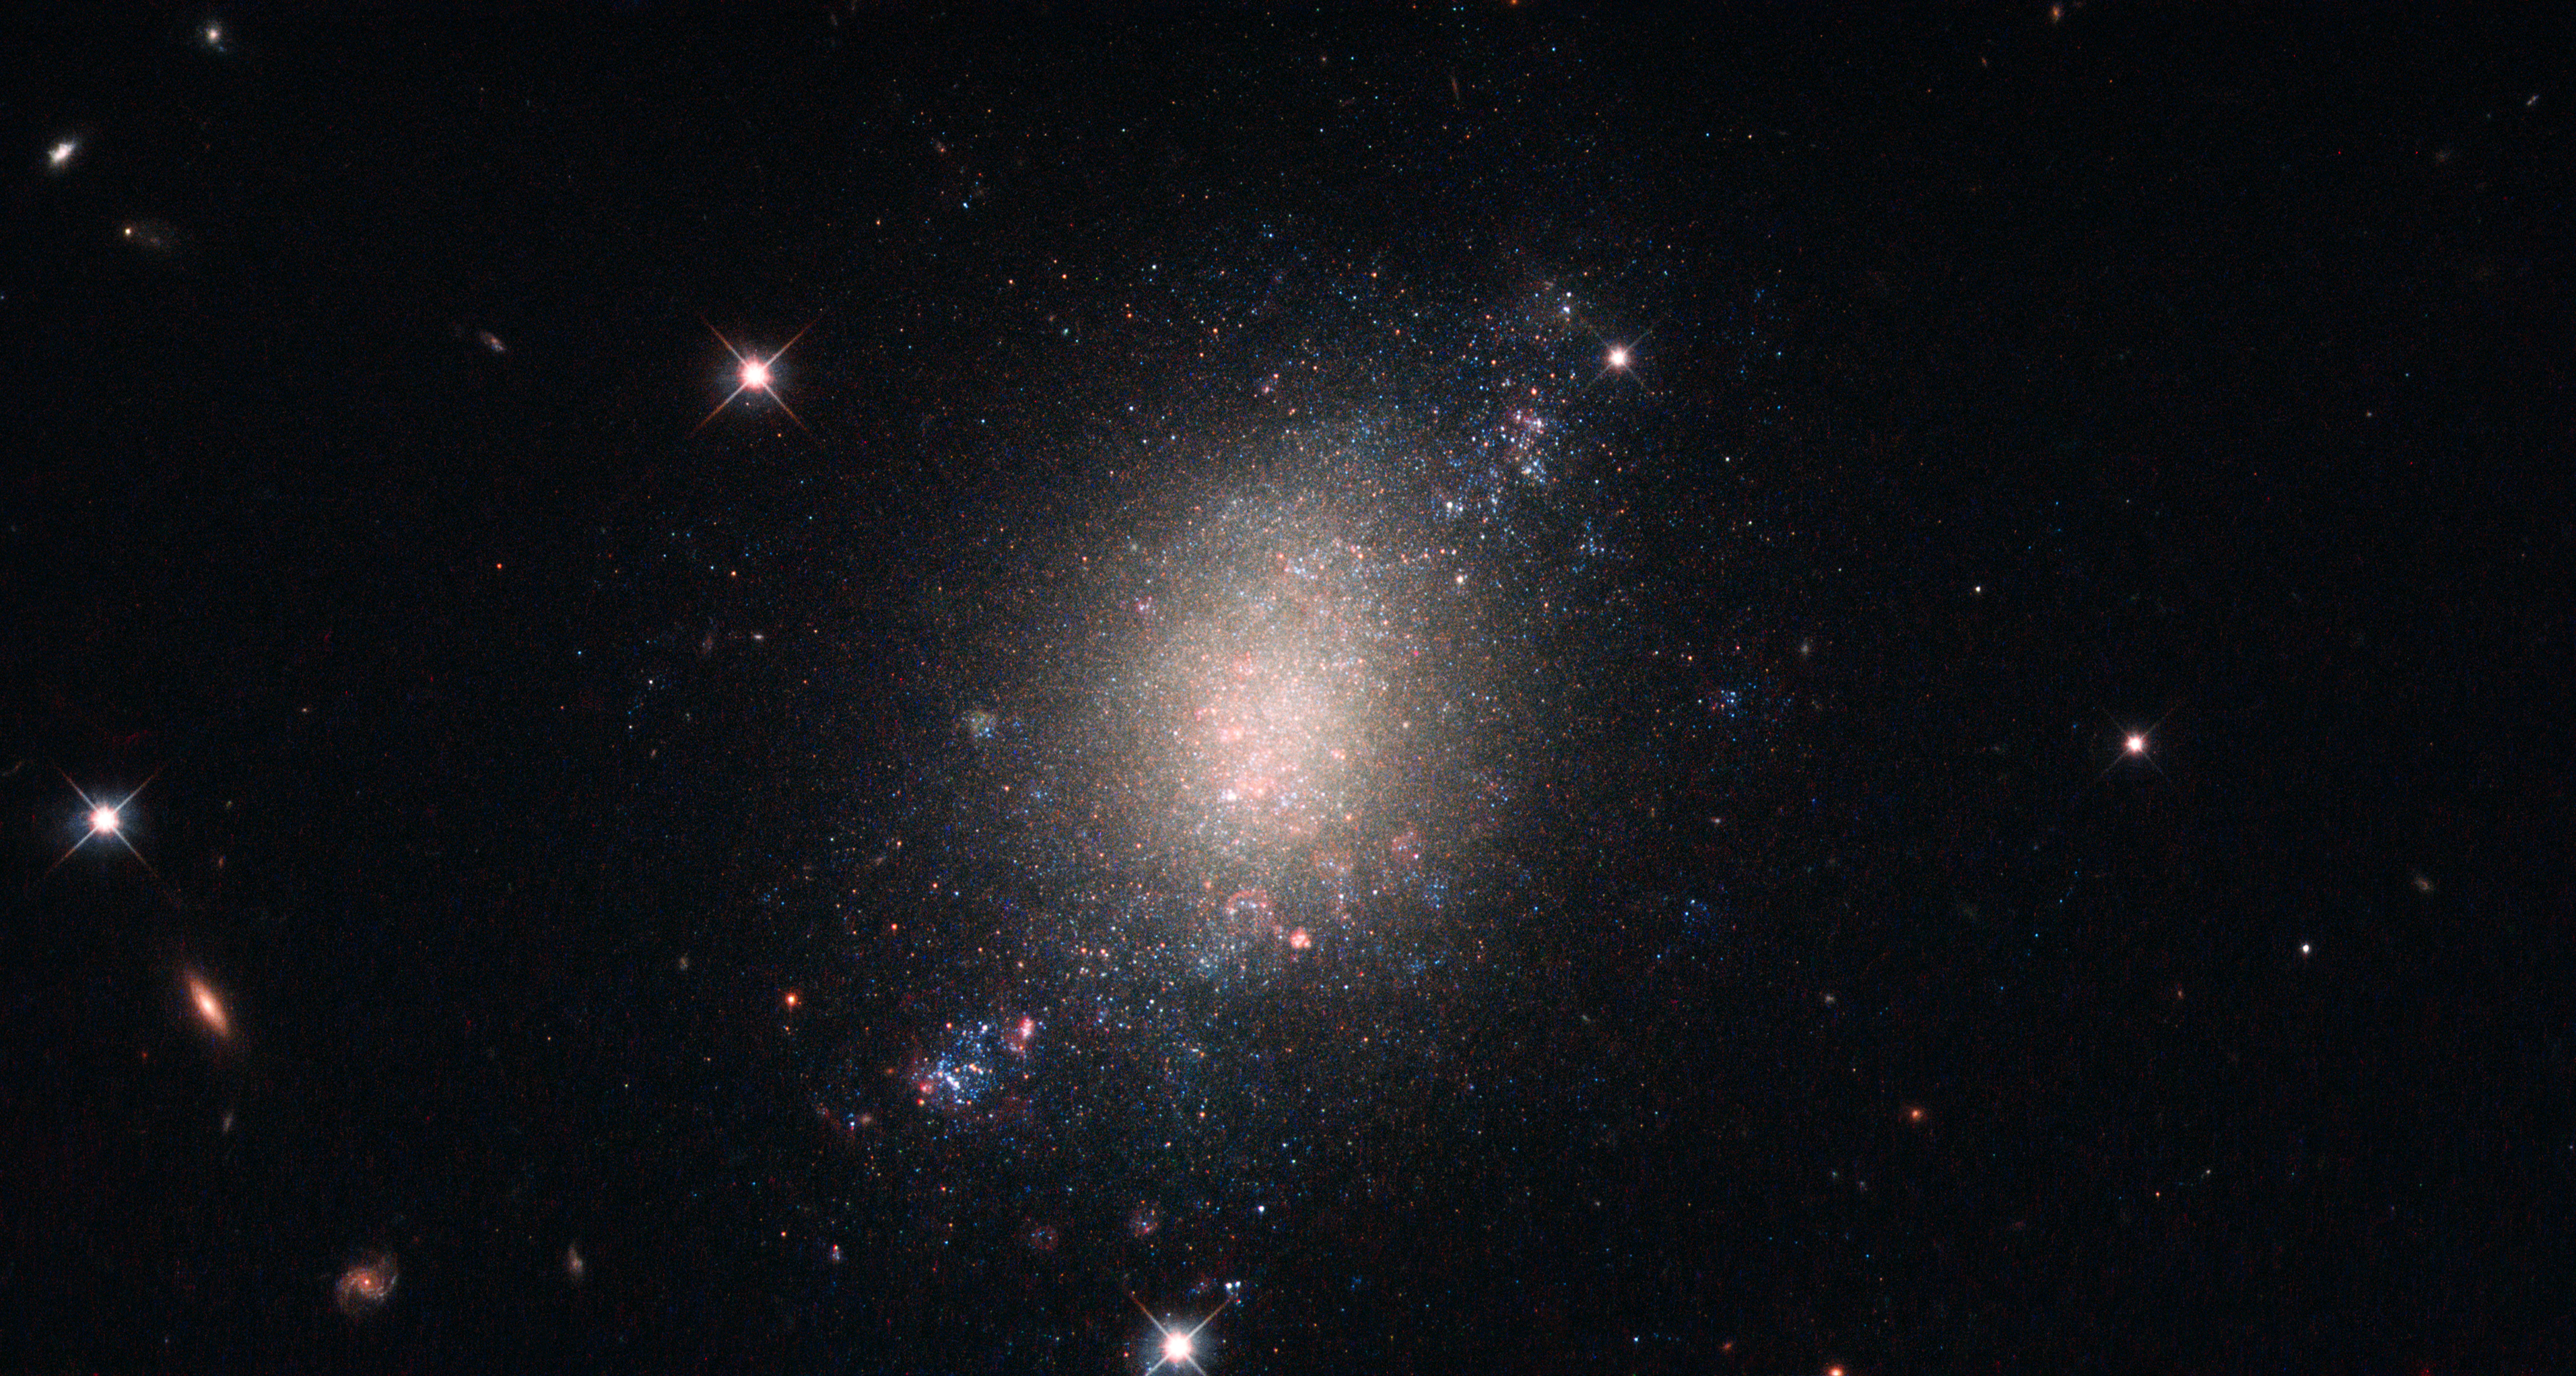

Surveying the cosmos

The object in the middle of this image, sitting alone within a star-studded cosmos, is a galaxy known as ESO 486-21. ESO 486-21 is a spiral galaxy — albeit with a somewhat irregular and ill-defined structure — located some 30 million light-years from Earth.

The NASA/ESA Hubble Space Telescope observed this object while performing a survey — the Legacy ExtraGalactic UV Survey (LEGUS) — of 50 nearby star-forming galaxies. The LEGUS sample was selected to cover a diverse range of galactic morphologies, star formation rates, galaxy masses, and more. Astronomers use such data to understand how stars form and evolve within clusters, and how these processes affect both their home galaxy and the wider Universe. ESO 486-21 is an ideal candidate for inclusion in such a survey as it is known to be in the process of forming new stars, which are created when large clouds of gas and dust (seen here in pink) within the galaxy crumple inwards upon themselves.

LEGUS made use of Hubble’s Wide Field Camera 3 (WFC3) and Advanced Camera for Surveys (ACS). The WFC3 obtained detailed observations of the target objects while the ACS obtained what are known as parallel fields — instead of leaving ACS idle, it was instead trained on a small patch of sky just offset from the target field itself, allowing it to gather additional valuable information while the primary target was being observed by WFC3. Parallel fields played an important role in Hubble’s Frontier Fields programme, which used the magnifying power of large galaxy clusters (via a phenomenon known as gravitational lensing) to explore objects in the distant Universe.

Credit: ESA/Hubble & NASA